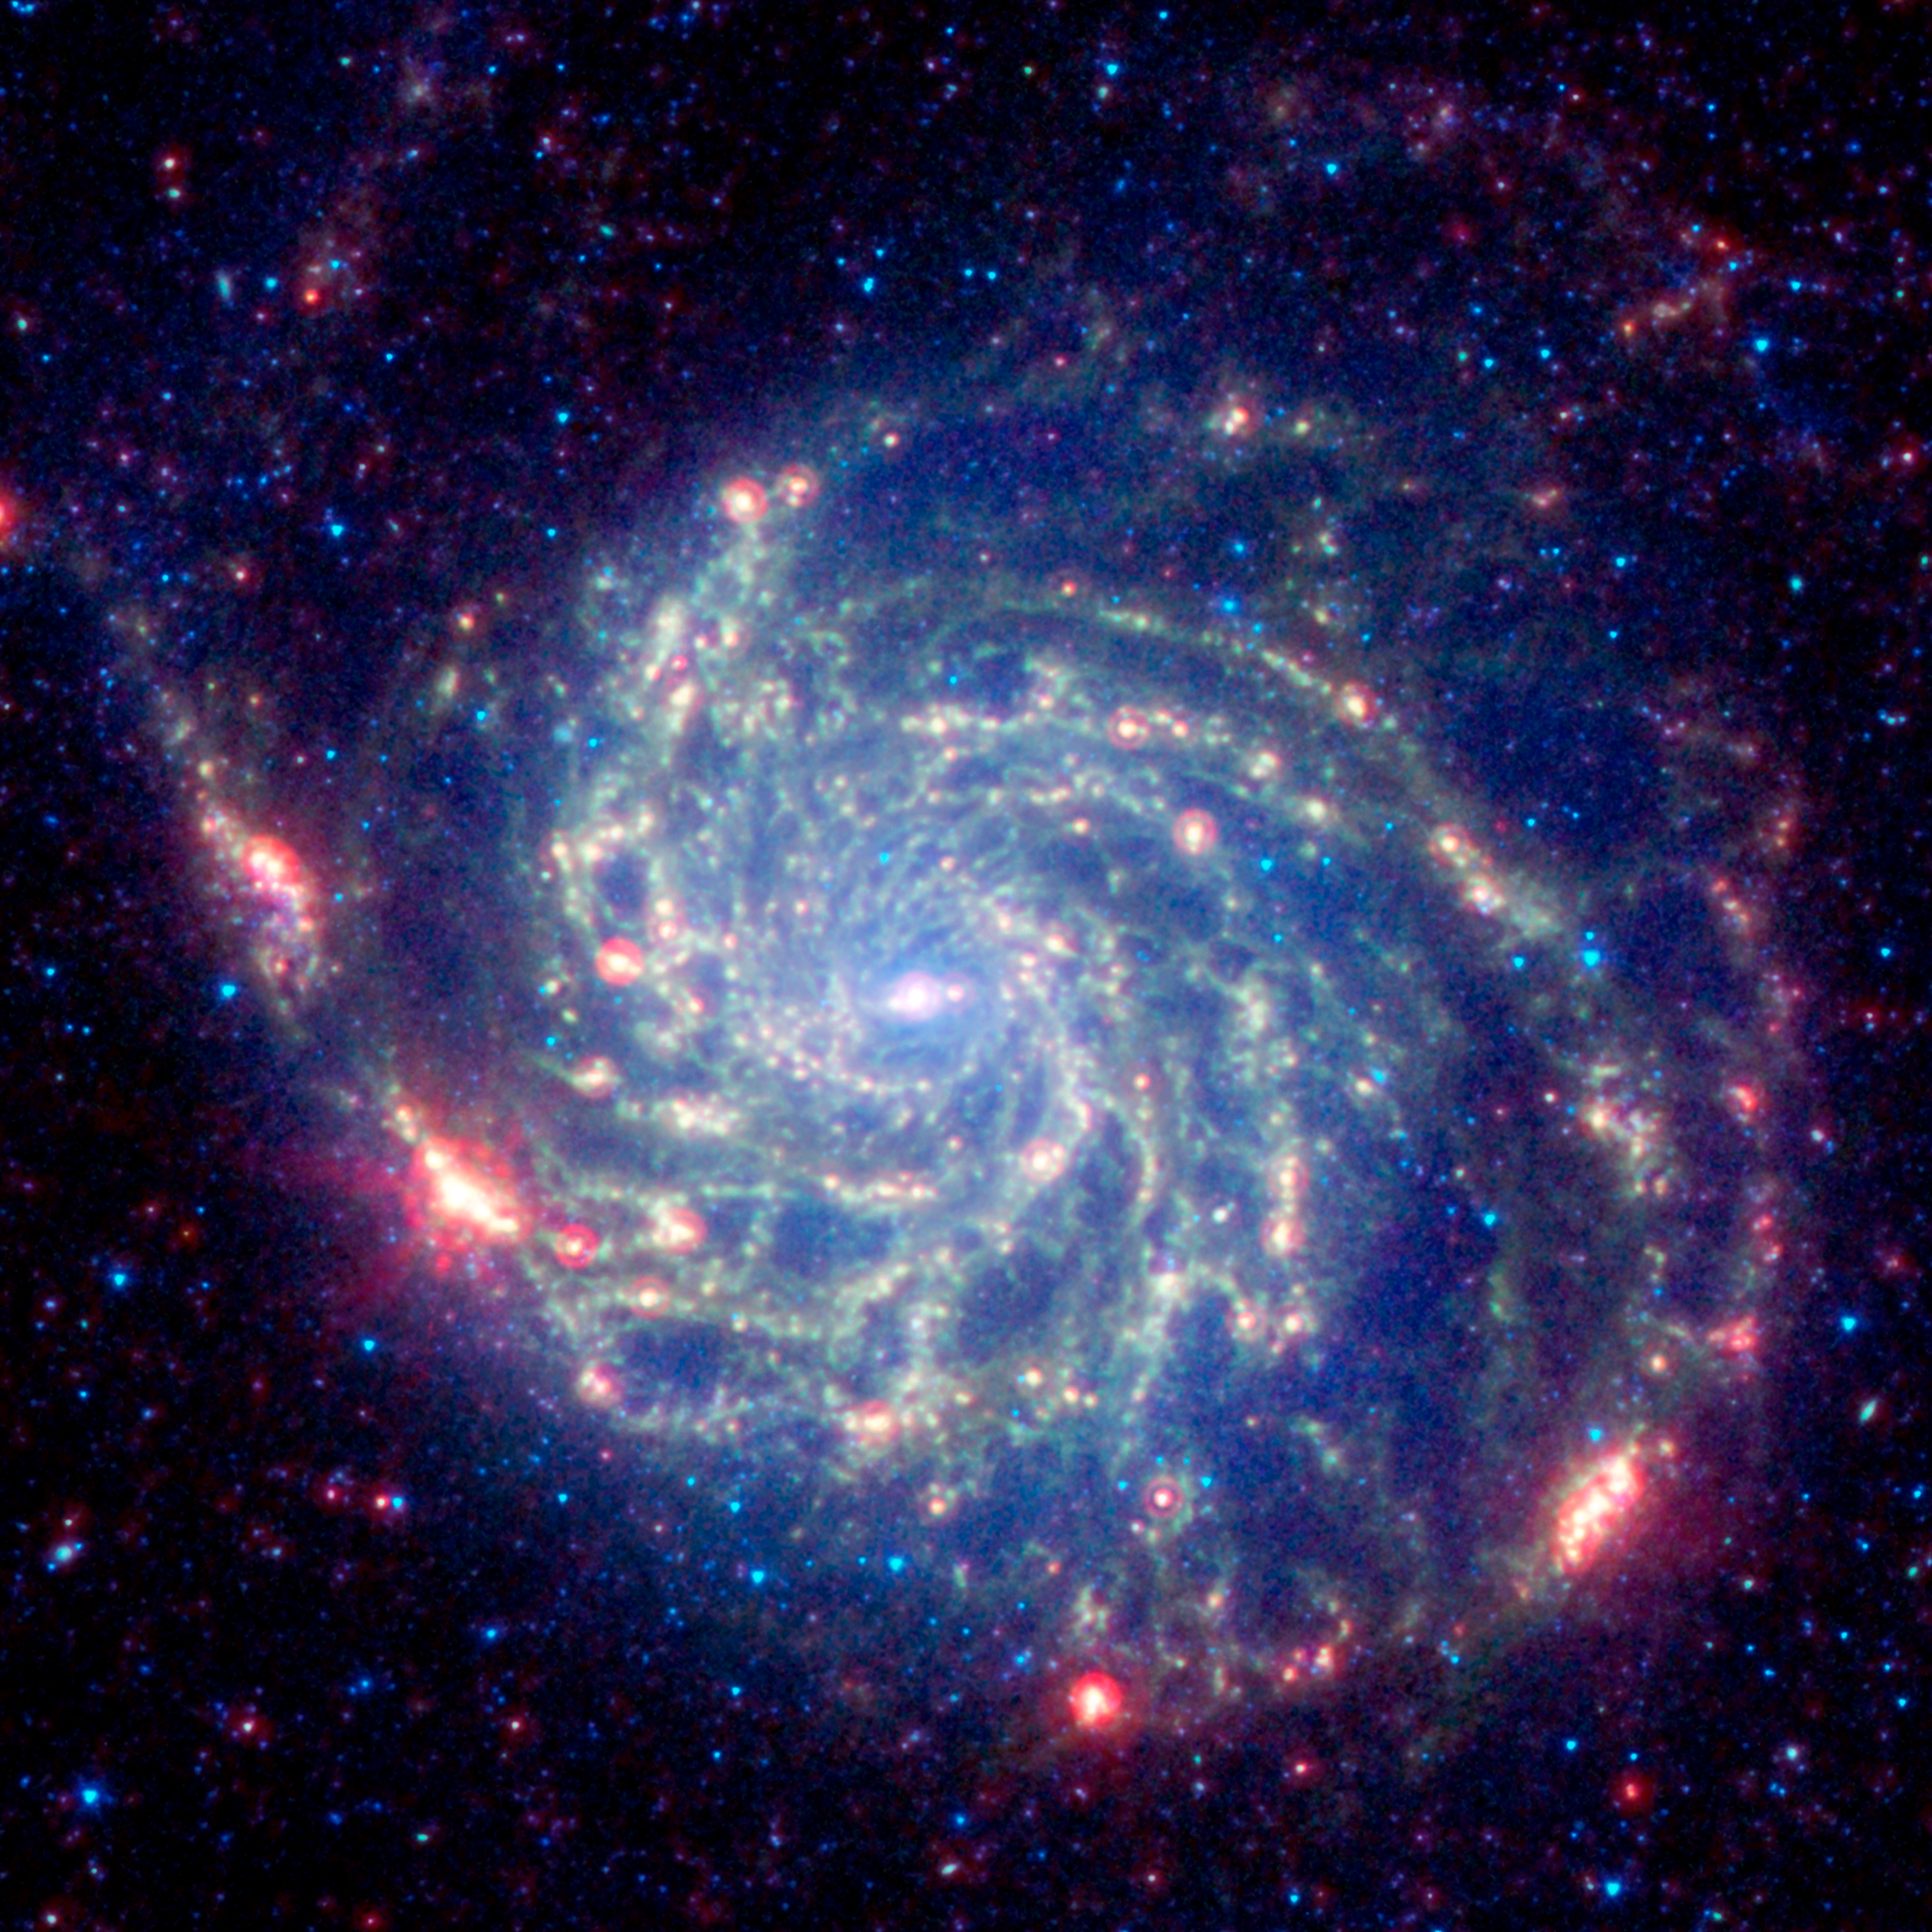

Spitzer image of M101

The galaxy Messier 101 is a swirling spiral of stars, gas, and dust. Messier 101 is nearly twice as wide as our Milky Way galaxy. Spitzer's view, taken in infrared light, reveals the galaxy's delicate dust lanes as yellow-green filaments. Such dense dust clouds are where new stars can form. In this image, dust warmed by the light of hot, young stars glows red. The rest of the galaxy's hundreds of billions of stars are less prominent and form a blue haze. Astronomers can use infrared light to examine the dust clouds where stars are born.

Credit: NASA, Jet Propulsion Laboratory/Caltech and K. Gordon (STScI)